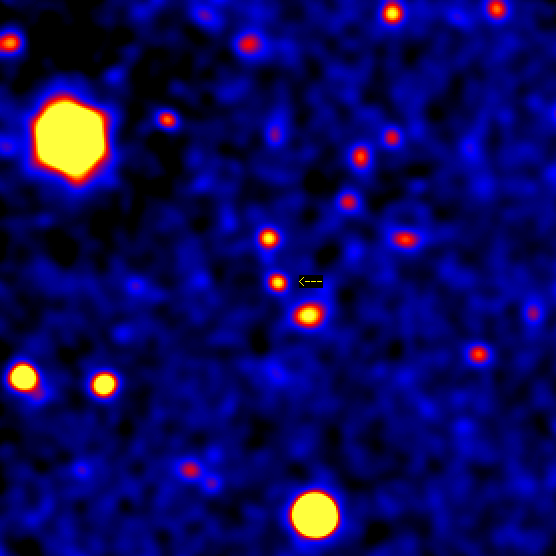

Gamma Ray Burst 971214

Image of the GRB 971214 field, obtained with the Keck 10-m telescope about four months after the burst, well after the afterglow has faded away. The extremely faint and distant galaxy (marked with an arrow) is the host galaxy of the gamma-ray burst.

Credit: S. G. Djorgovski and S. R. Kulkarni (Caltech), the Caltech GRB Team, and W. M. Keck Observatory